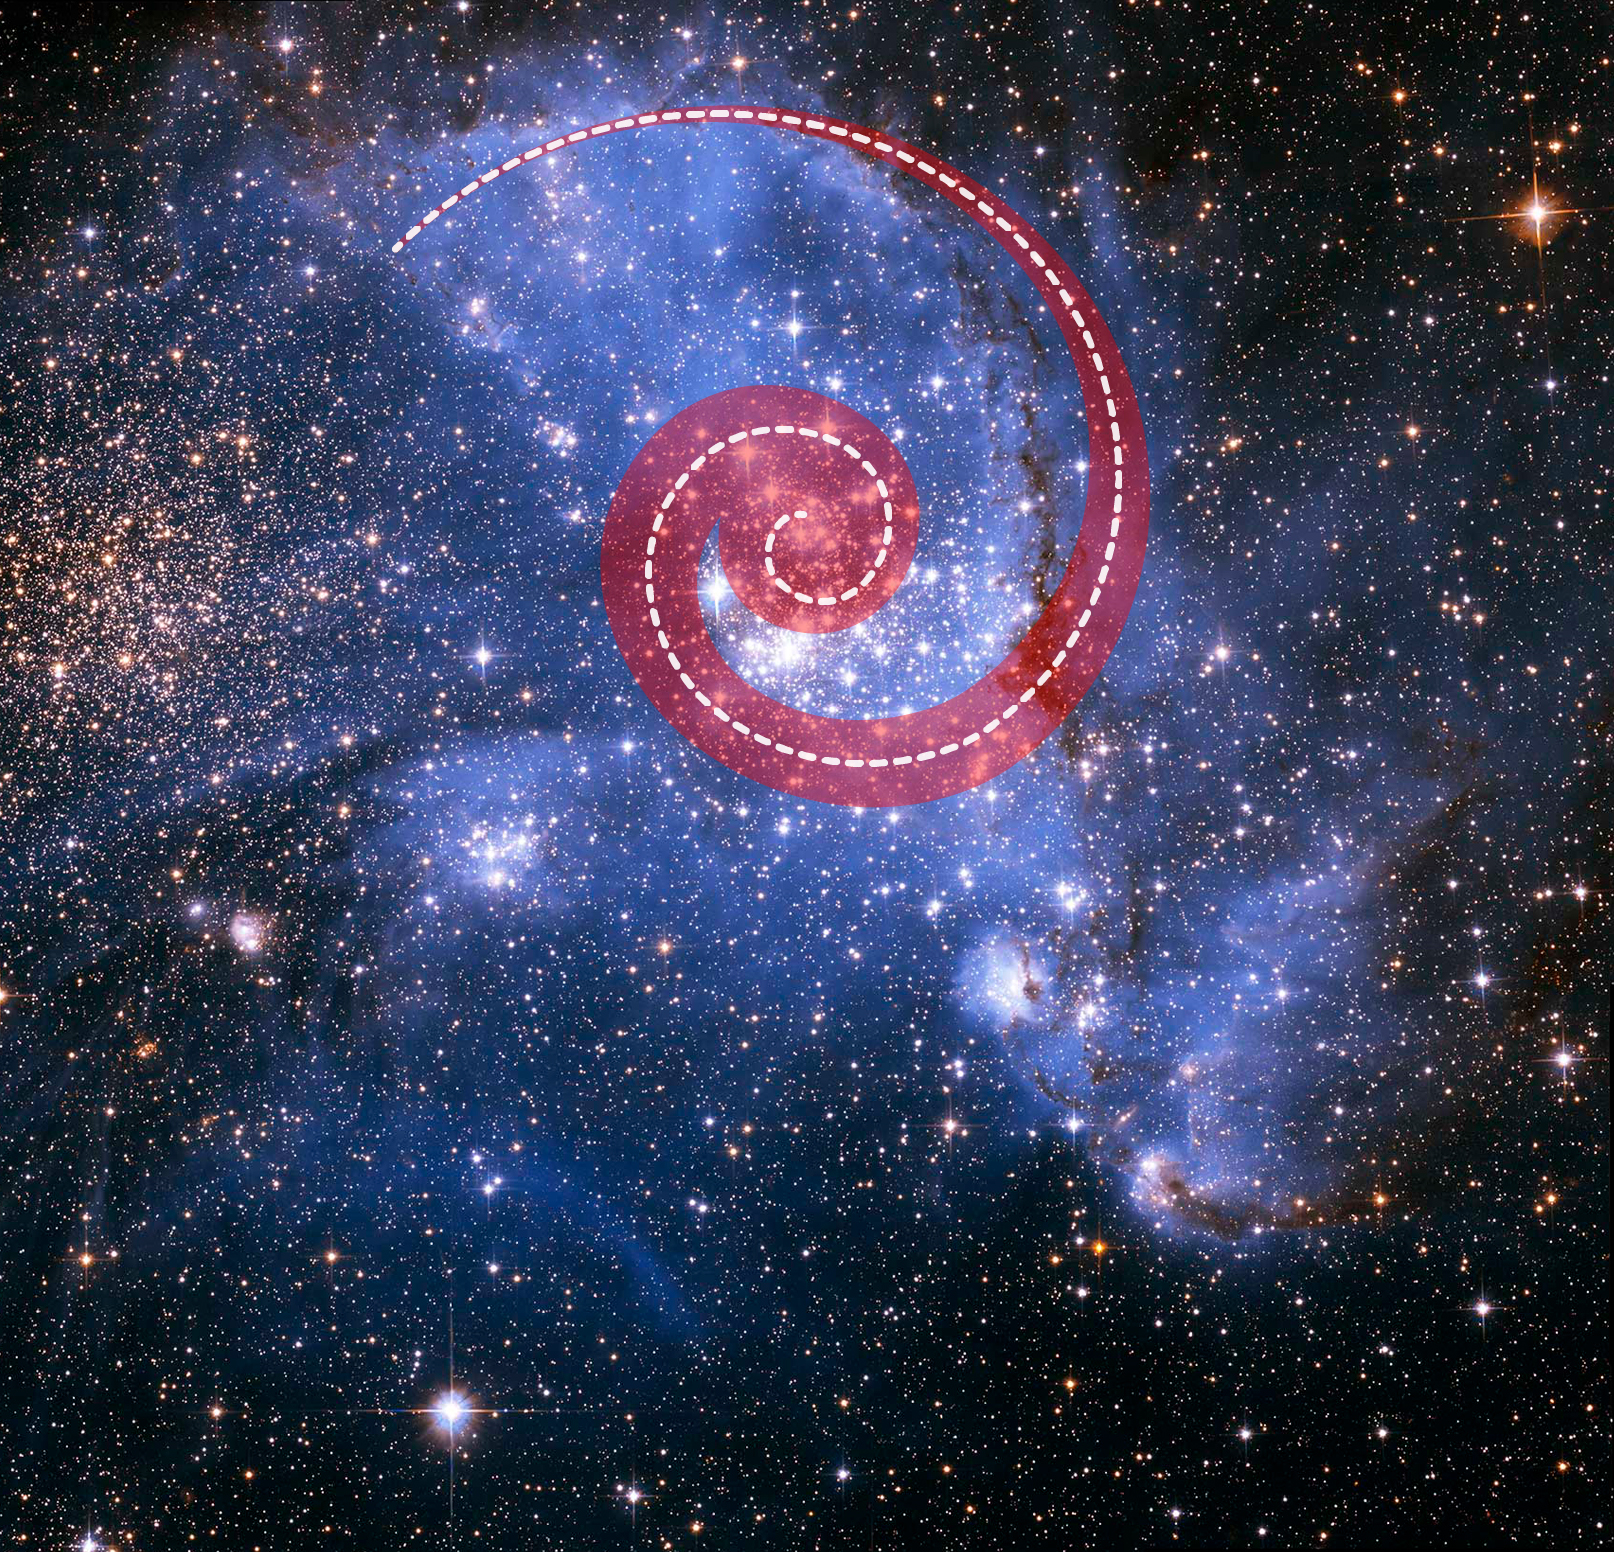

Spiralling Stars in NGC 346

Astronomers have been bemused to find young stars spiralling into the centre of a massive cluster of stars in the Small Magellanic Cloud, a satellite galaxy of the Milky Way. The outer arm of the spiral in this huge, oddly shaped stellar nursery — called NGC 346 — may be feeding star formation in a river-like motion of gas and stars.

The red spiral superimposed on NGC 346 traces the movement of stars and gas toward the center. Scientists say this spiraling motion is the most efficient way to feed star formation from the outside toward the center of the cluster.

Credit: NASA, ESA, A. James (STScI)